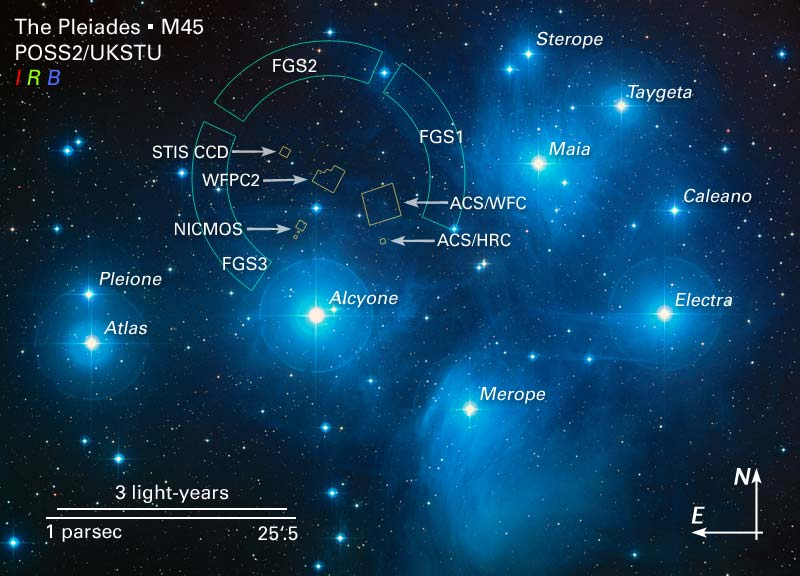

Annotated image of the pleiades and HST field of view

The brilliant stars seen in this image are members of the popular open star cluster known as the Pleiades, or Seven Sisters. The Hubble Space Telescope's Fine Guidance Sensors refined the distance to the Pleiades at about 440 light-years. The Fine Guidance Sensors are at the periphery of Hubble's field-of-view. They trace a circumference that is approximately the angular size of the Moon on the sky. They are overlaid on this image to give a scale to Hubble's very narrow view on the heavens.

Credit: NASA, ESA and AURA/Caltech